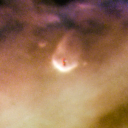

124-132

One of 42 new proplyds discovered in the Orion Nebula, 124-132 is one of the bright proplyds that lies relatively close to the nebula’s brightest star, Theta 1 Orionis C. This proplyd is surrounded by a shock wave that is caused by stellar wind from the massive Theta 1 Orionis C interacting with gas in the nebula.

Credit: NASA/ESA and L. Ricci (ESO)